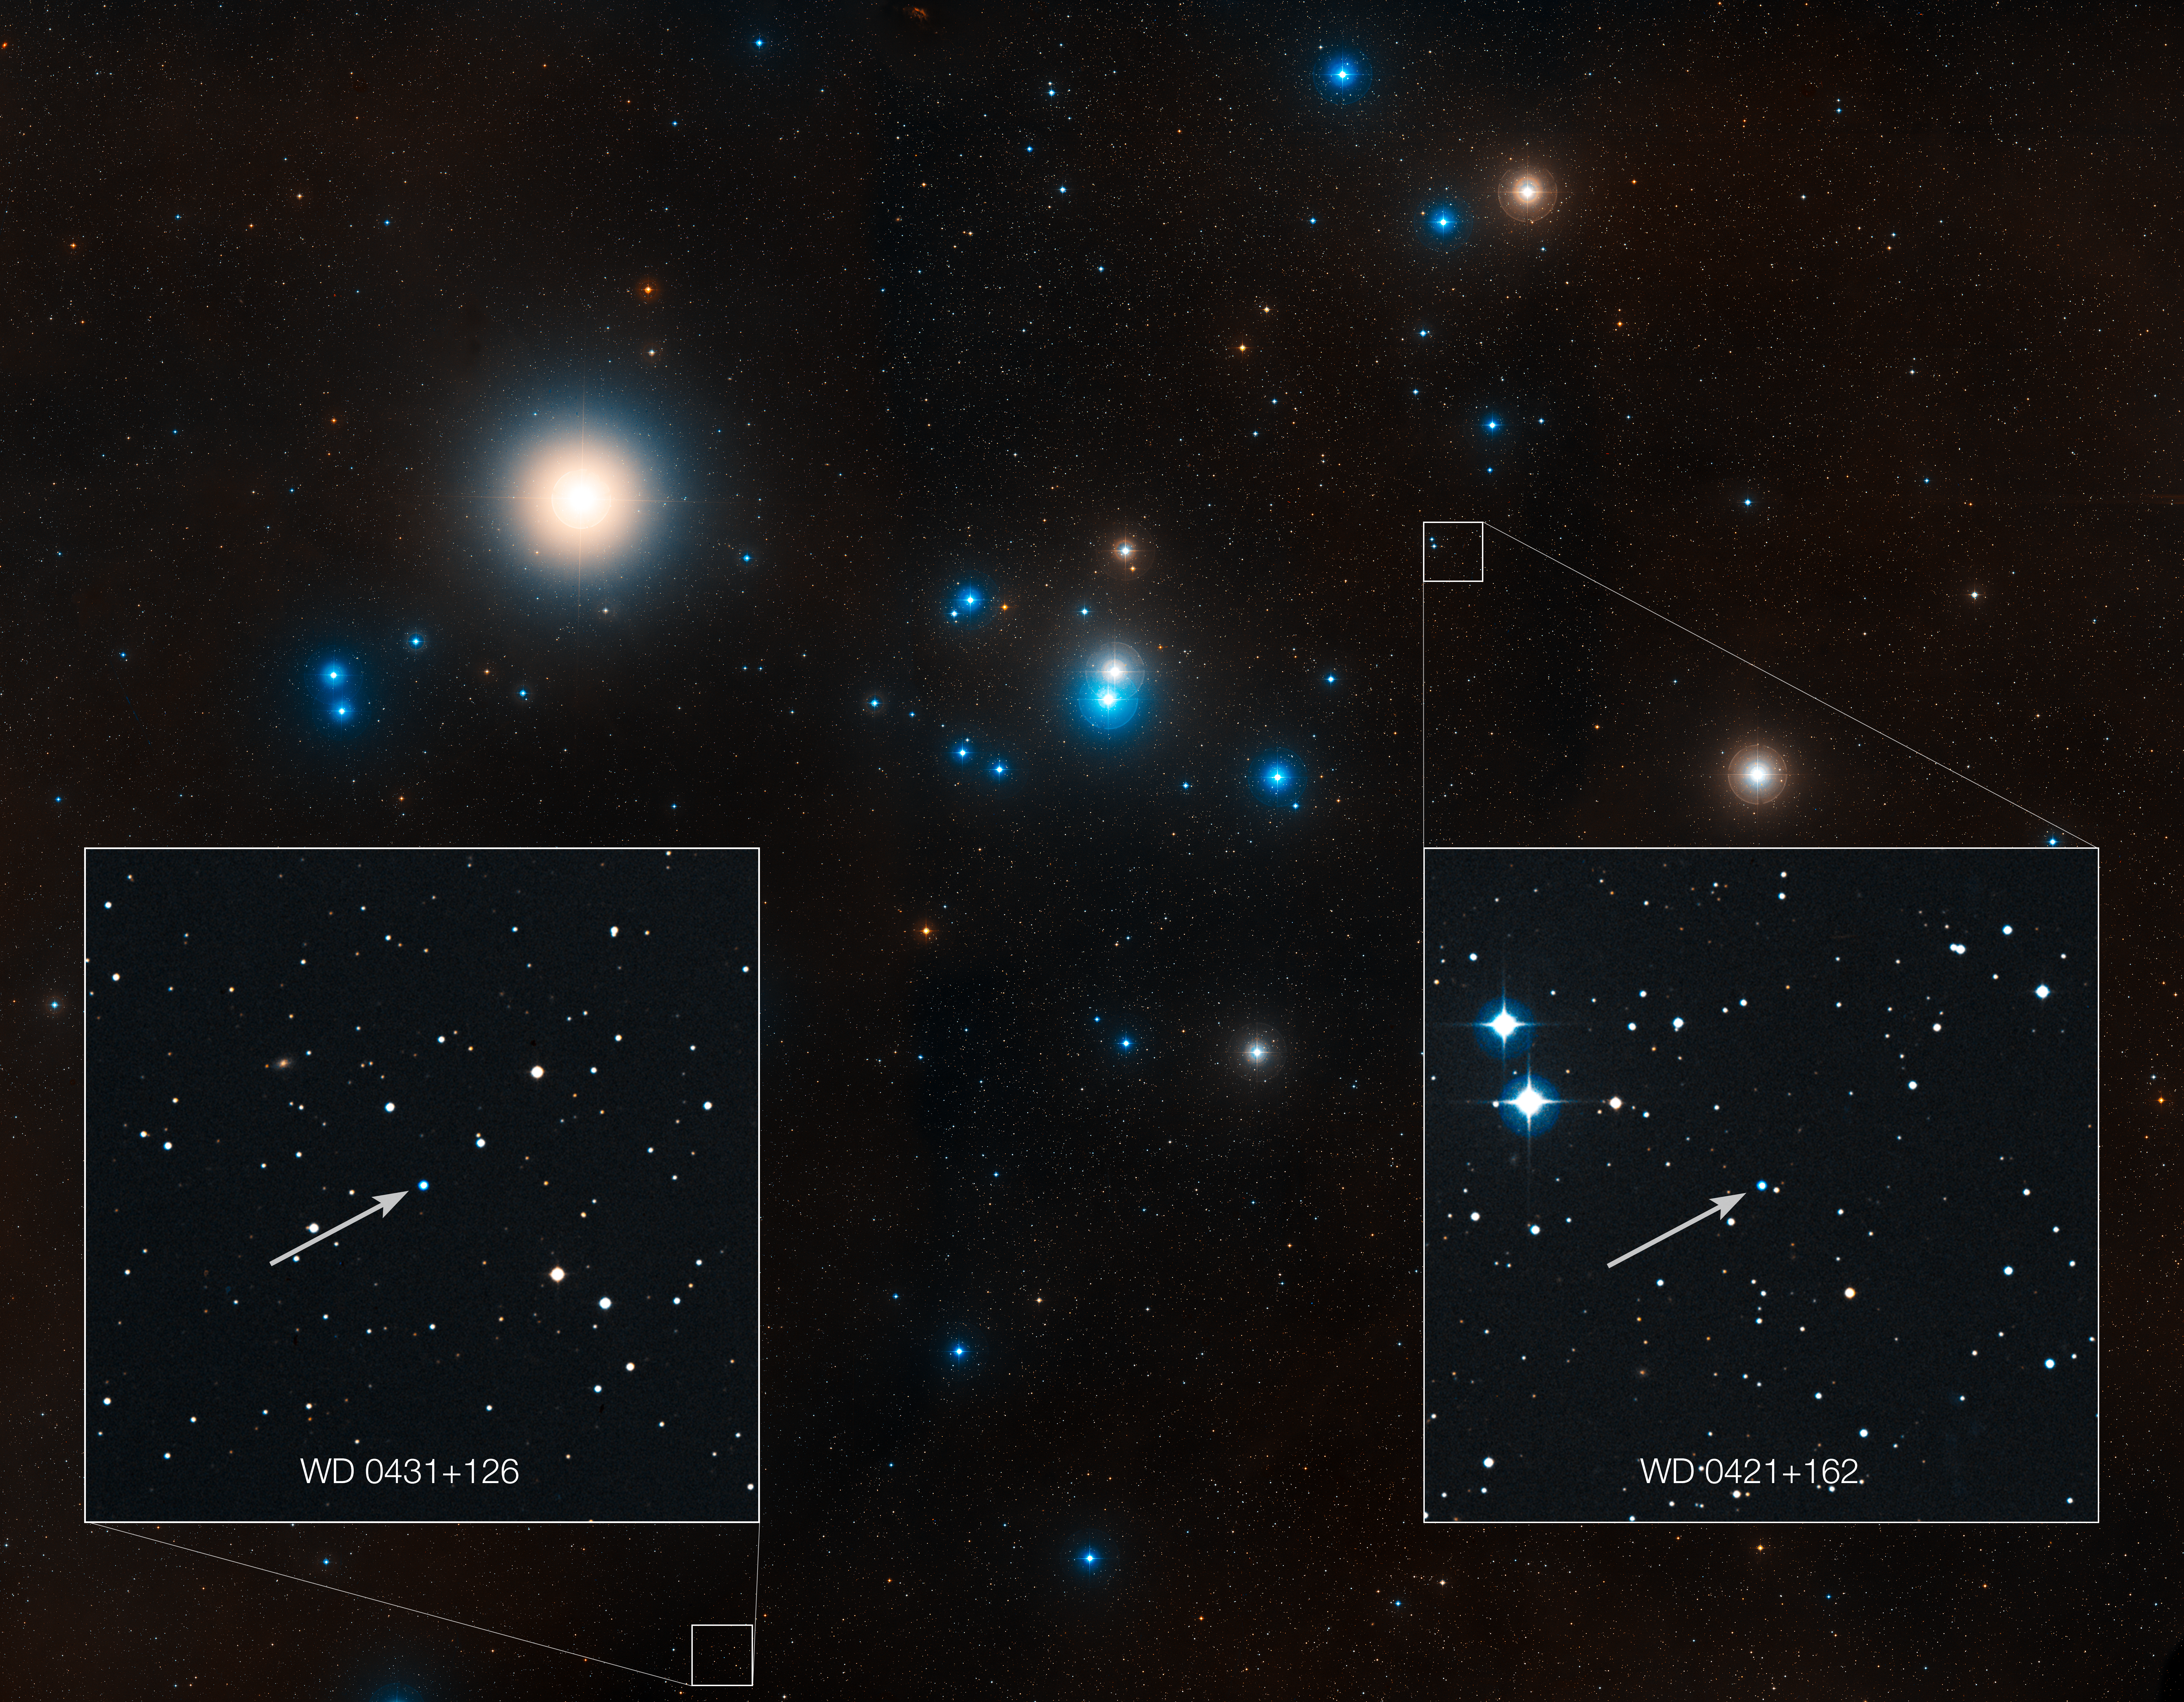

Labelled overview of the Hyades star cluster (ground-based image)

This image shows the region around the Hyades star cluster, the nearest open cluster to us. The Hyades cluster is very well-studied due to its location, but previous searches for planets have produced only one. A new study led by Jay Farihi of the University of Cambridge, UK, has now found the atmospheres of two burnt-out stars in this cluster — known as white dwarfs — to be “polluted” by rocky debris circling the star.

Inset, the locations of these white dwarf stars are indicated — stars known as WD 0421+162, and WD 0431+126.

Credit: NASA, ESA, STScI, and Z. Levay (STScI)